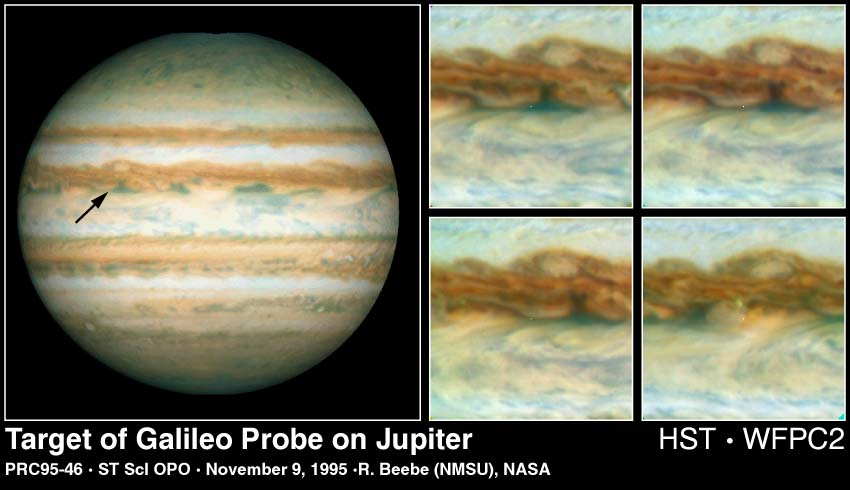

Galileo Probe Entry Site on Jupiter

Left

This Hubble Space Telescope image of Jupiter was taken on Oct. 5, 1995, when the giant planet was at a distance of 534 million miles (854 million kilometers) from Earth. The arrow points to the predicted site at which the Galileo Probe will enter Jupiter's atmosphere on December 7, 1995. At this latitude, the eastward winds have speeds of about 250 miles per hour (110 meters per second). The white oval to the north of the probe site drifts westward at 13 miles per hour (6 meters per second), rolling in the winds which increase sharply toward the equator.

Right

These four enlarged Hubble images of Jupiter's equatorial region show clouds sweeping across the predicted Galileo probe entry site, which is at the exact center of each frame (a small white dot has been inserted at the centered at the predicted entry site). The first image (upper left quadrant) was obtained with the WFPC2 on Oct. 4, 1995 at (18 hours UT). The second, third and fourth images (from upper right to lower right) were obtained 10, 20 and 60 hours later, respectively.

Credit: Reta Beebe (New Mexico State University), and NASA/ESA